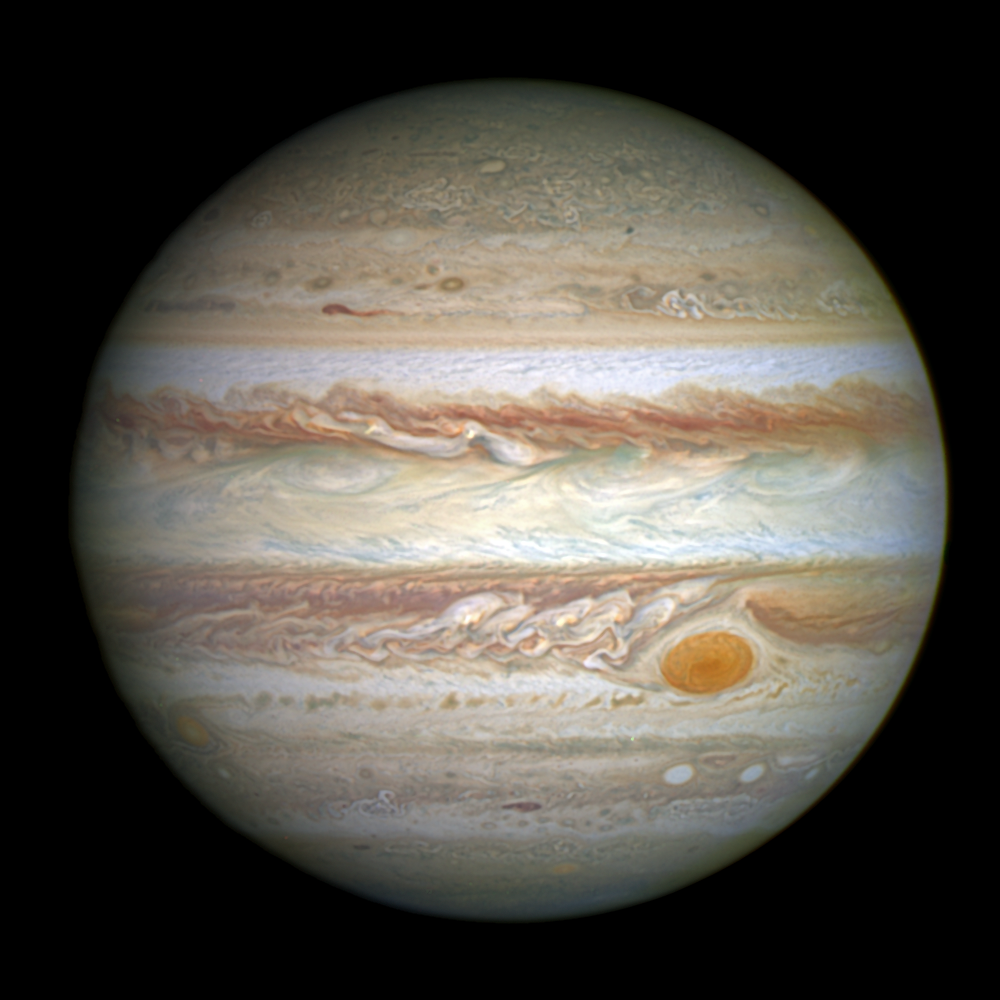

Jupiter and its shrunken Great Red Spot

This full-disc image of Jupiter was taken on 21 April 2014 with Hubble's Wide Field Camera 3 (WFC3).

Credit: NASA, ESA, and A. Simon (Goddard Space Flight Center)
Acknowledgement: C. Go Science Credit: A. Simon (Goddard Space Flight Center), G. Orton (Jet Propulsion Laboratory), J. Rogers (University of Cambridge, UK), and M. Wong and I. de Pater (University of California, Berkeley)